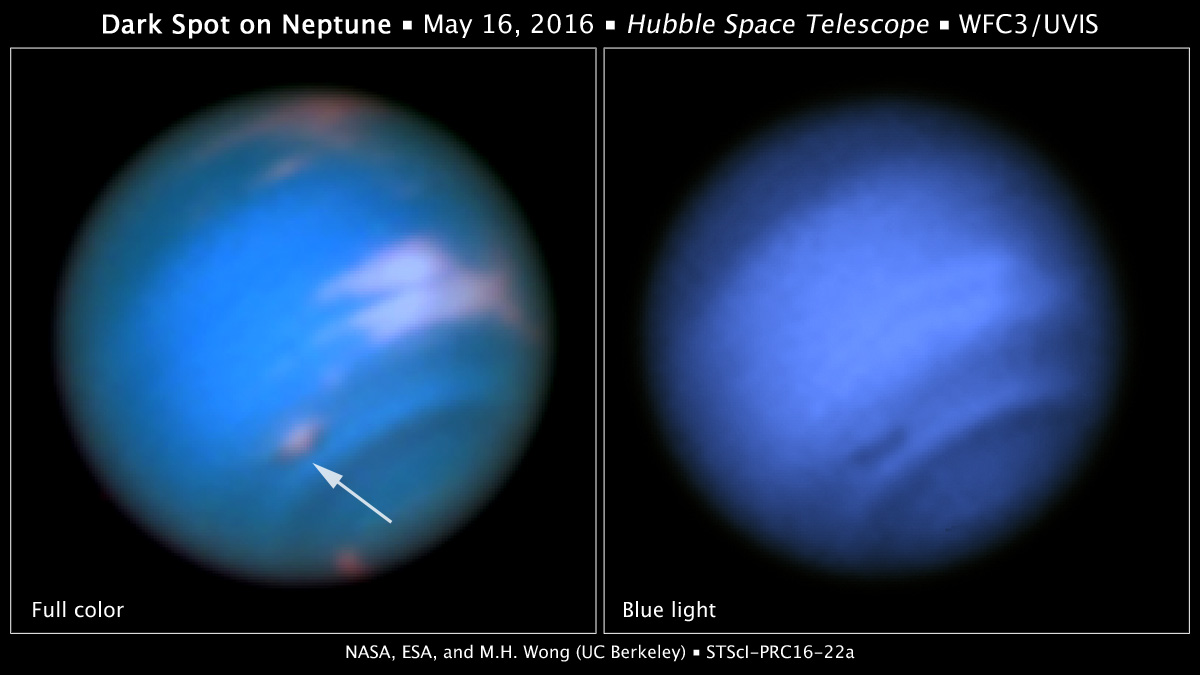

Dark spot on Neptune

This new image taken with the NASA/ESA Hubble Space Telescope confirms the presence of a dark vortex in the atmosphere of Neptune. The full visible-light image at left shows that the dark feature resides near and below a patch of bright clouds in the planet's southern hemisphere. The dark spot measures roughly 4,800 kilometers across. Other high-altitude clouds can be seen at the planet's equatorial region and polar regions.

The image at right shows that Neptune's dark vortices are typically best seen at blue wavelengths. Only Hubble has the high resolution required for identifying such weather features on distant Neptune.

Though similar features were seen during the Voyager 2 flyby of Neptune in 1989 and by Hubble in 1994, this vortex is the first one observed on the planet in the 21st century. In September 2015, the Outer Planet Atmospheres Legacy (OPAL) program, a long-term Hubble Space Telescope project that annually captures global maps of the outer planets, revealed a dark spot close to the location of the bright clouds, which had been tracked from the ground. By viewing the vortex a second time, the new Hubble images, taken by Wide Field Camera 3 on May 16, 2016, confirm that OPAL really detected a long-lived feature. With the new data, the team created a higher-quality map of the vortex and its surroundings.

Credit: NASA, ESA, and M.H. Wong and J. Tollefson (UC Berkeley)